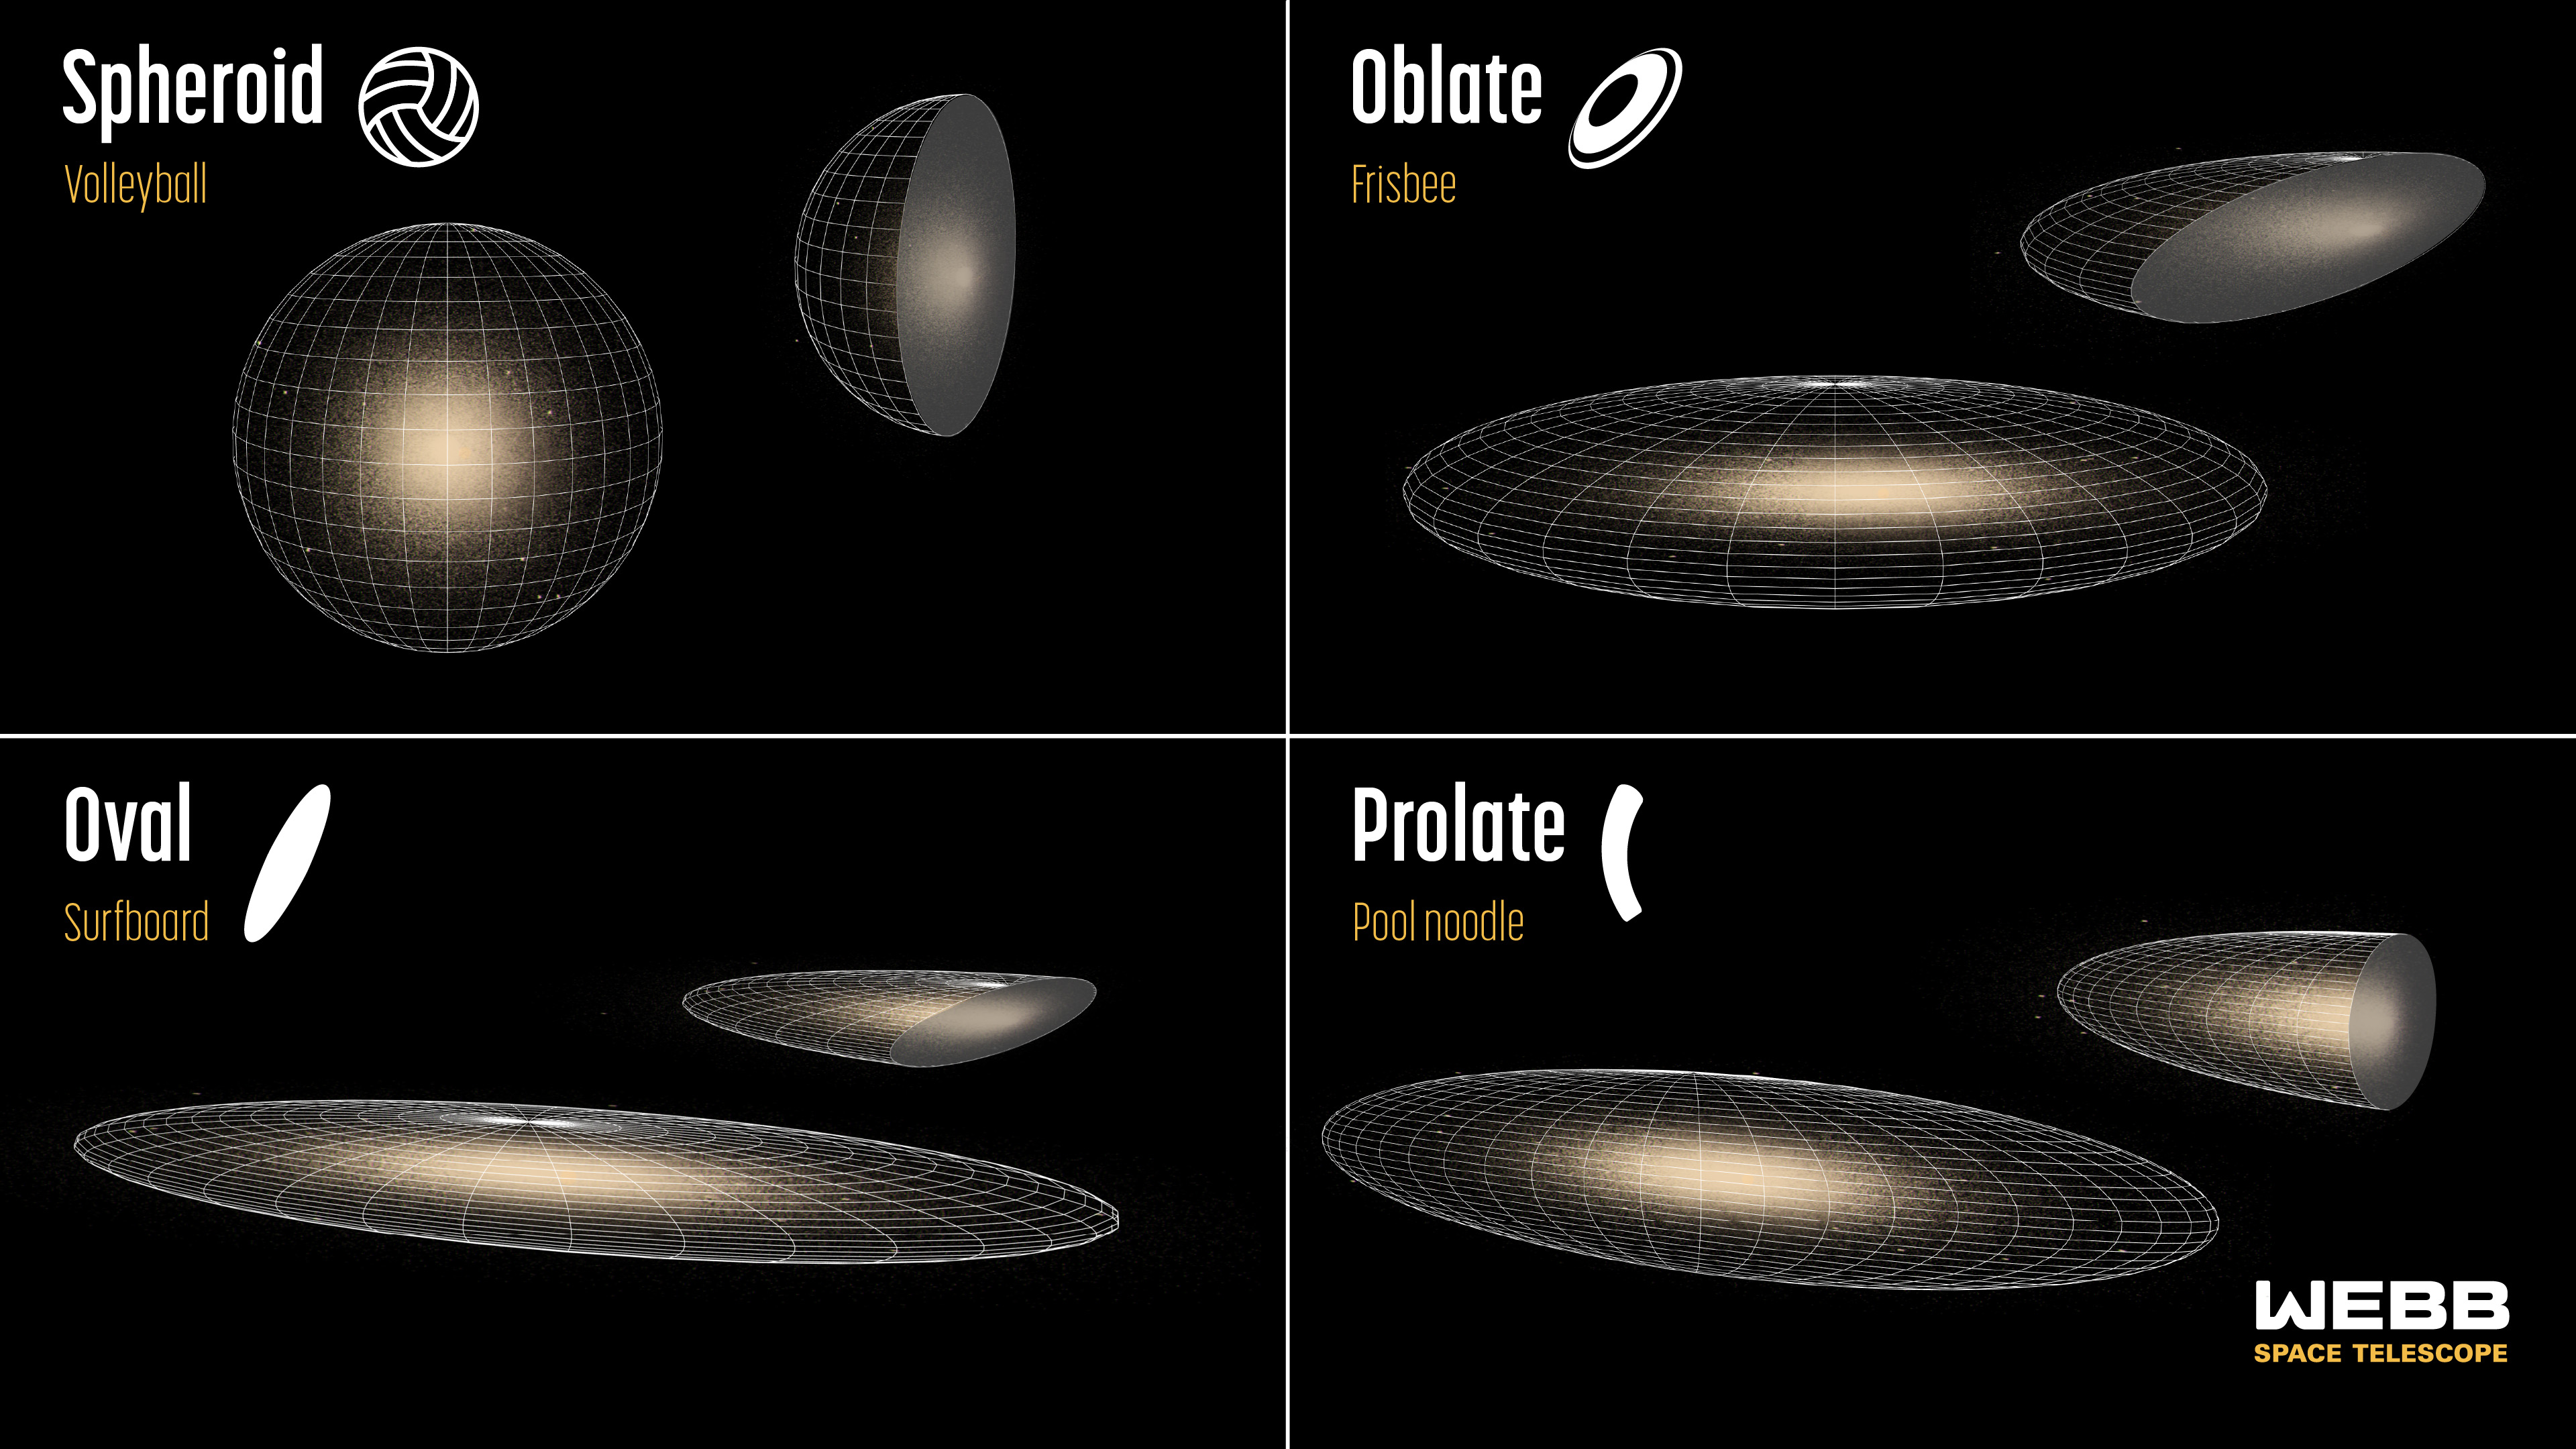

Early galaxy shapes detected by Webb (artist concept)

The NASA/ESA/CSA James Webb Space Telescope is already helping researchers fine-tune their classifications of distant galaxies – adding significant speed and detail to analysis that has been underway for decades.

New research has focused on several thousand galaxies in Webb’s Cosmic Evolution Early Release Science (CEERS) Survey that existed when the Universe was 600 million to 6 billion years old. The team found that most distant galaxies do not look like the more familiar spiral and elliptical galaxies that lie closer to Earth. The science team pinpointed four main classifications, shown illustrated above as both 3D objects and cross sections. They are ordered from least to most frequent.

At top left, Webb’s survey shows a classification that’s rare in the early Universe, but common today: Galaxies that are shaped like spheres or volleyball.

At top right are flattened circular disks or frisbees, which are only slightly more common.

The galaxy shapes that dominate during this early period look flat and elongated, like surfboards, shown at bottom left, or pool noodles, bottom right. This pair of classifications make up approximately 50 to 80% of all distant galaxies they’ve studied so far – a surprise, since these shapes are uncommon nearby.

The advances in astronomers’ classifications are owed to Webb’s sensitivity, high-resolution images, and specialisation in infrared light. The astronomical community will also need to fully classify more distant galaxies with much larger sample sizes from Webb and other telescopes before settling on any firm groupings.

Credit: NASA, ESA, CSA, STScI, J. Olmsted (STScI), V. Pandya (Columbia University), H. Zhang (University of Arizona), L. Reading-Ikkanda (Simons Foundation)